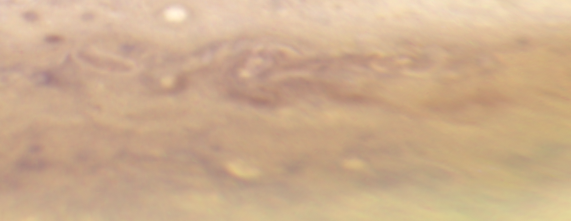

Jupiter: 23 September 2009

Image taken with Hubble's Wide Field Camera 3 on 23 September 2009.

Credit: NASA, ESA, I. de Pater and M. Wong (University of California, Berkeley), H.B. Hammel (Space Science Institute, Boulder, Colo.), and the Jupiter Impact Team